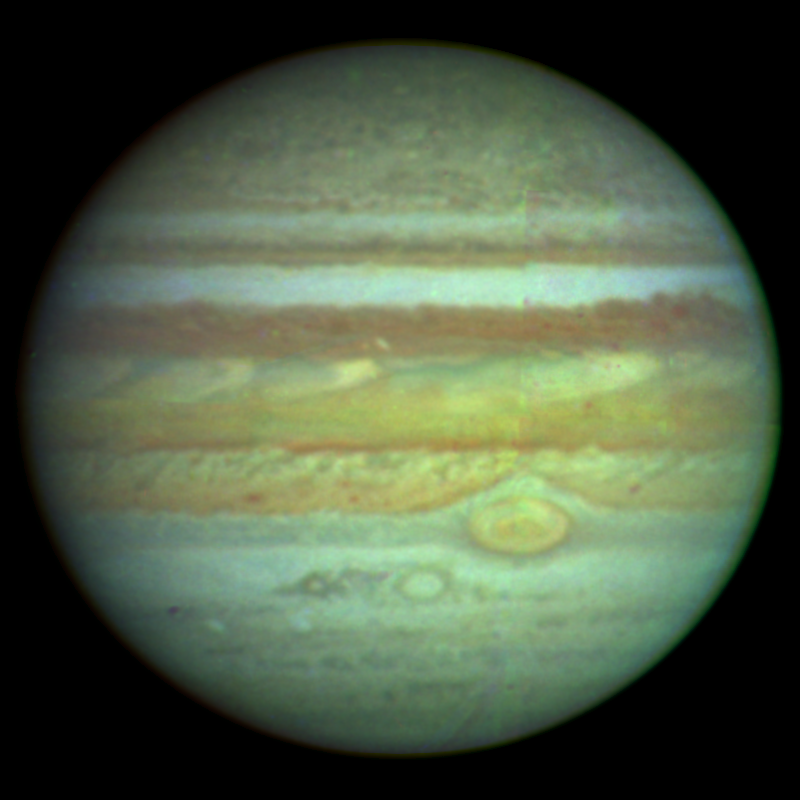

NASA/ESA Hubble Space Telescope produces clear colour photo of Jupiter

This is the first true-color photograph of the giant planet Jupiter from the Wide Field Planetary Camera on NASA/ESA Hubble Space Telescope. All features in this image are cloud formations in the atmosphere of Jupiter, which contain small crystals of frozen ammonia and traces of colorful chemical compounds of carbon, sulfur, and phosphorus. The temperatures of the clouds are extremely cold, about -280 degrees F.

Credit: NASA & ESA